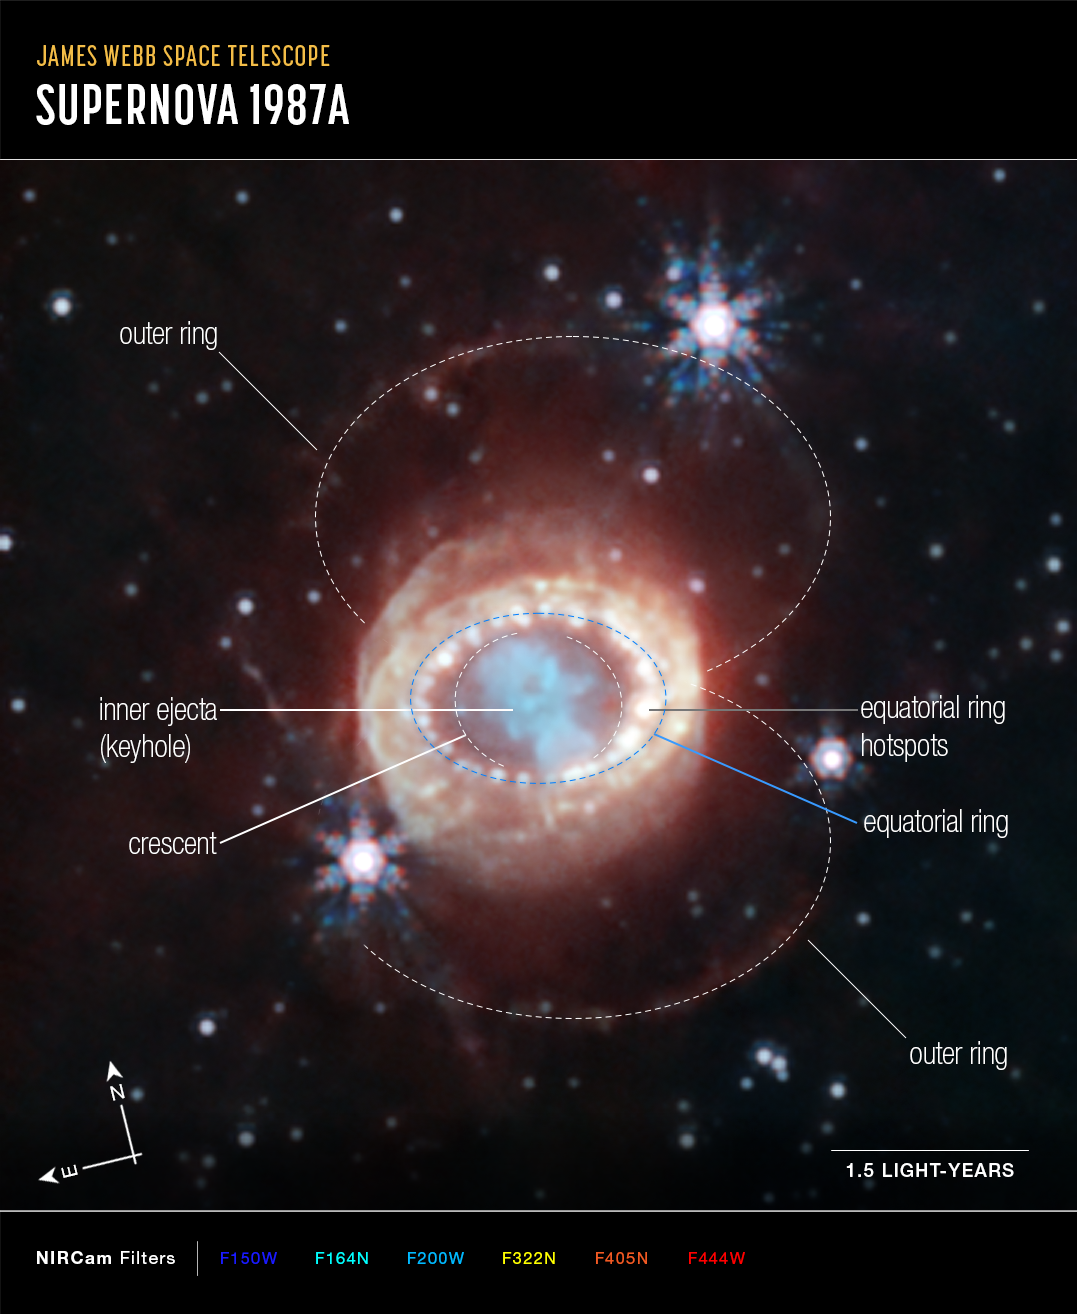

SN 1987A (NIRCam image, annotated)

The NASA/ESA/CSA James Webb Space Telescope has begun the study of one of the most renowned supernovae, SN 1987A (Supernova 1987A). Located 168,000 light-years away in the Large Magellanic Cloud, SN 1987A has been a target of intense observations at wavelengths ranging from gamma rays to radio for nearly 40 years, since its discovery in February of 1987. New observations by Webb’s NIRCam (Near-Infrared Camera) provide a crucial clue to our understanding of how a supernova develops over time to shape its remnant.

This image reveals a central structure like a keyhole. This center is packed with clumpy gas and dust ejected by the supernova explosion. The dust is so dense that even near-infrared light that Webb detects can’t penetrate it, shaping the dark “hole” in the keyhole.

A bright, equatorial ring surrounds the inner keyhole, forming a band around the waist that connects two faint arms of hourglass-shaped outer rings. The equatorial ring, formed from material ejected tens of thousands of years before the supernova explosion, contains bright hot spots, which appeared as the supernova’s shock wave hit the ring. Now spots are found even exterior to the ring, with diffuse emission surrounding it. These are the locations of supernova shocks hitting more exterior material.

In this image blue represents light at 1.5 microns (F150W), cyan 1.64 and 2.0 microns (F164N, F200W), yellow 3.23 microns (F323N), orange 4.05 microns (F405N), and red 4.44 microns (F444W).

Credit: NASA, ESA, CSA, M. Matsuura (Cardiff University), R. Arendt (NASA’s Goddard Spaceflight Center & University of Maryland, Baltimore County), C. Fransson (Stockholm University), J. Larsson (KTH Royal Institute of Technology), A. Pagan (STScI)